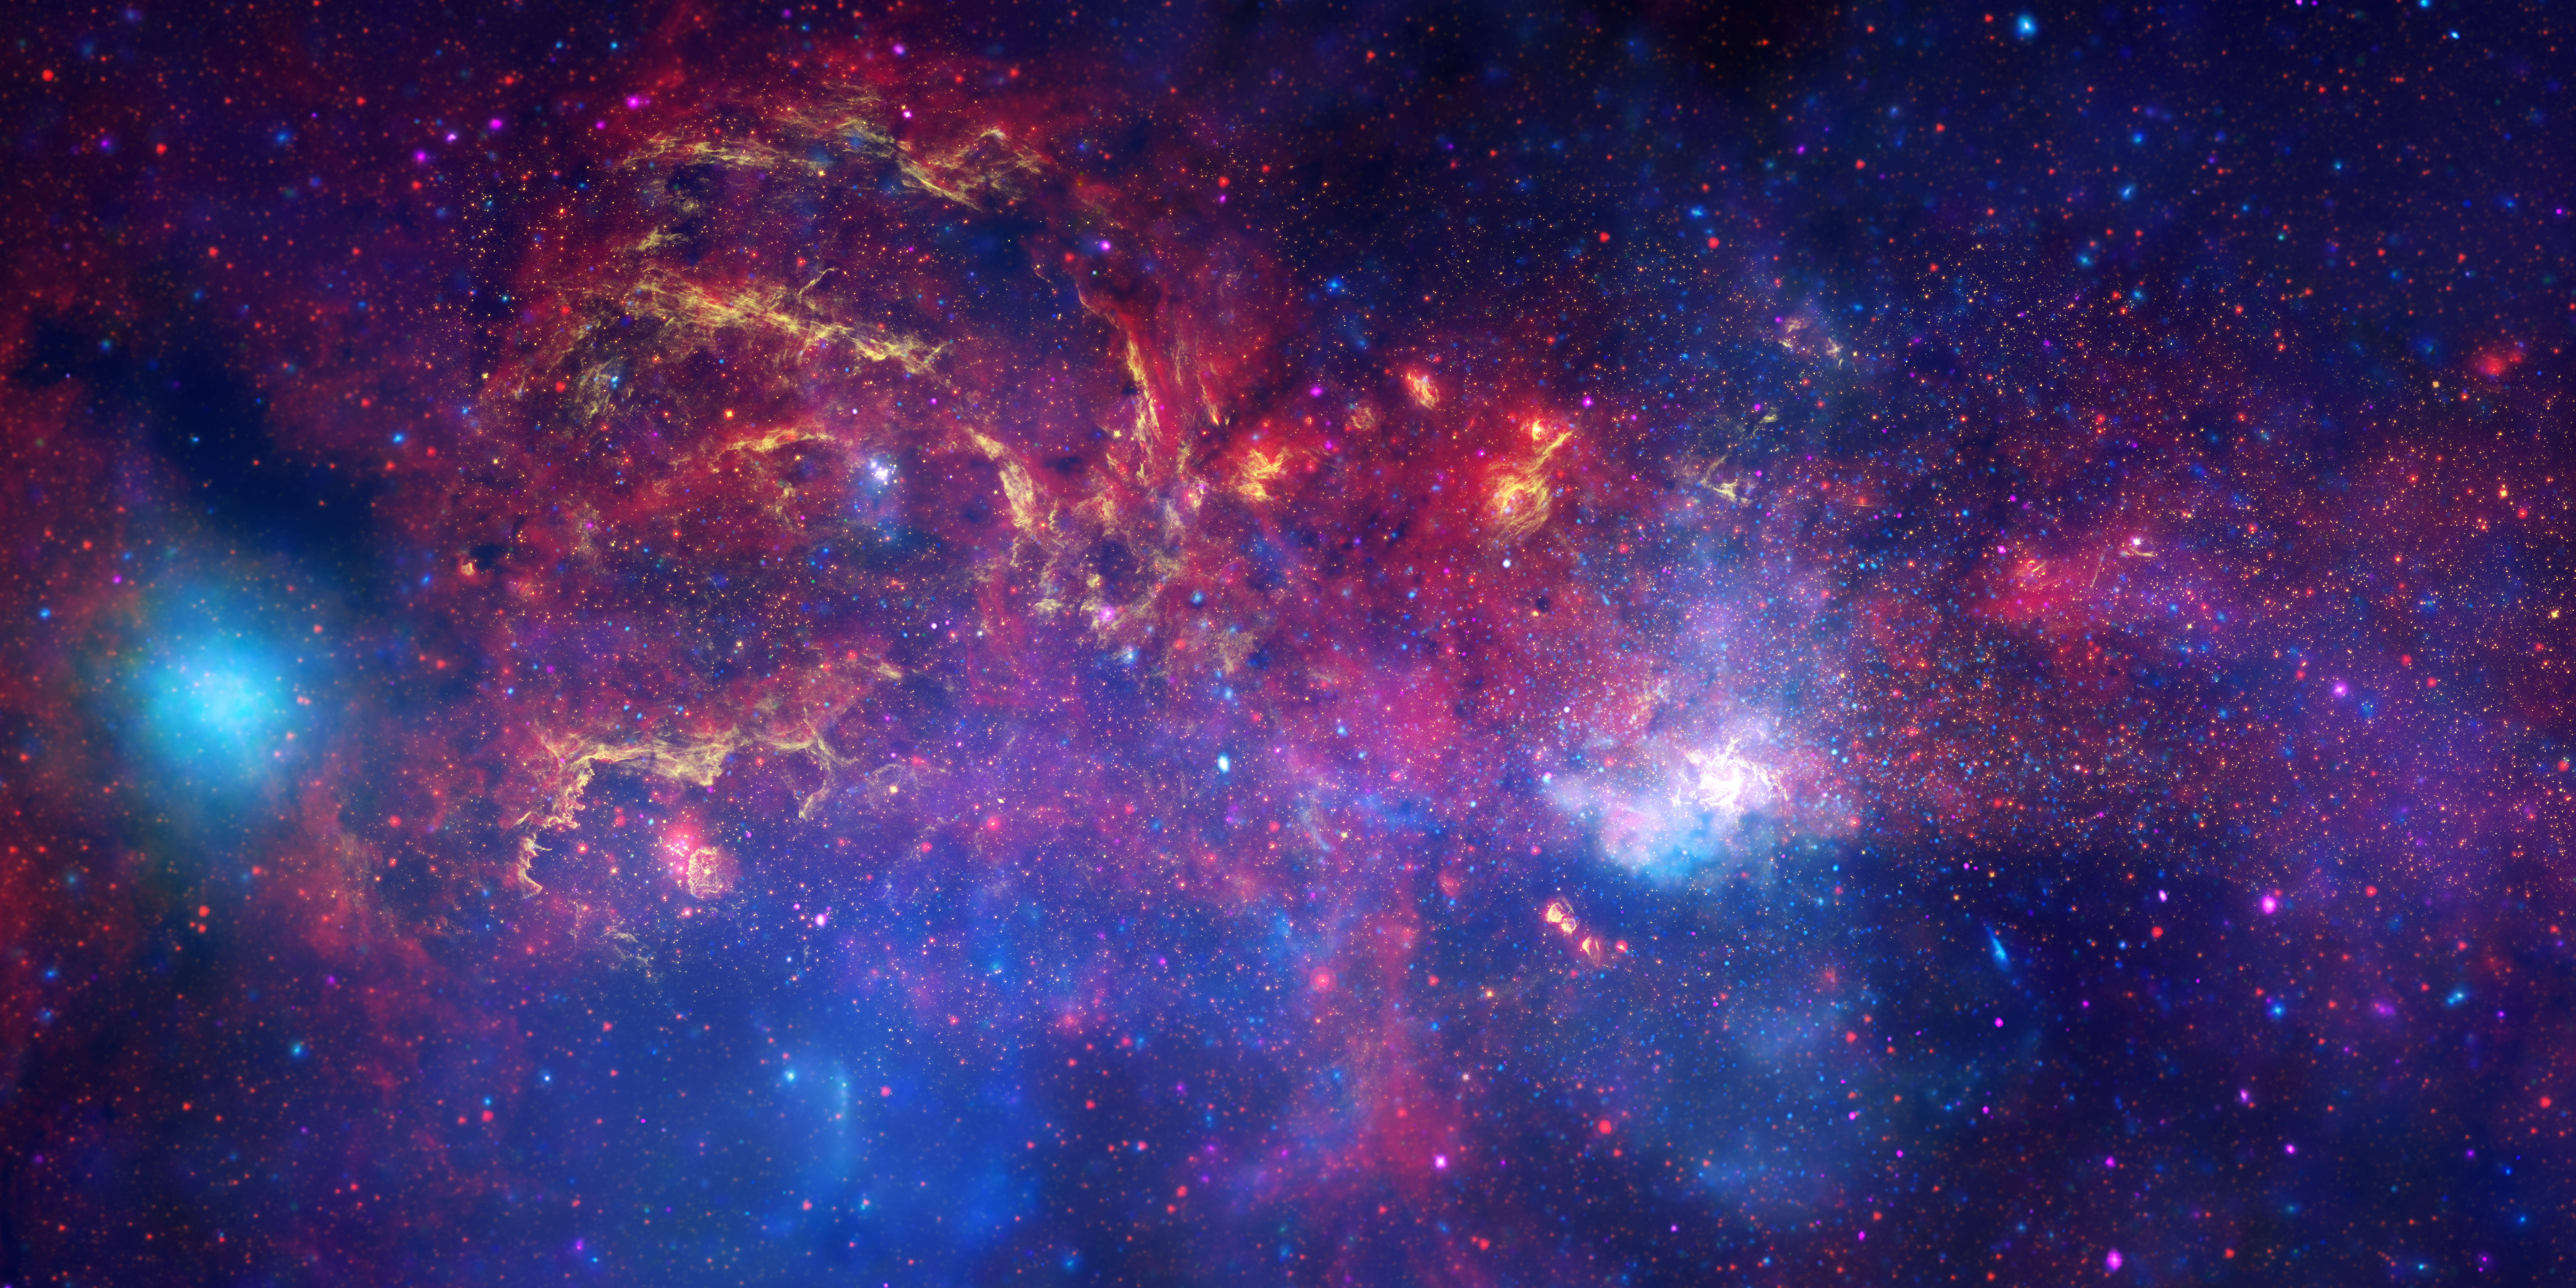

Hubble and other Great Observatories examine the galactic centre region

In celebration of the International Year of Astronomy 2009, the NASA/ESA Hubble Space Telescope and its companion Great Observatories: the Spitzer Space Telescope and the Chandra X-ray Observatory have collaborated to produce an unprecedented image of the central region of our Milky Way galaxy.

In this spectacular image, observations using infrared light and X-ray light see through the obscuring dust and reveal the intense activity near the galactic core. Note that the centre of the galaxy is located within the bright white region to the right of and just below the middle of the image. The entire image width covers about one-half a degree, about the same angular width as the full moon.

Each telescope's contribution is presented in a different colour:

Yellow represents the near-infrared observations of Hubble. They outline the energetic regions where stars are being born as well as reveal hundreds of thousands of stars.
Red represents the infrared observations of Spitzer. The radiation and winds from stars create glowing dust clouds that exhibit complex structures from compact, spherical globules to long, stringy filaments.
Blue and violet represent the X-ray observations of Chandra. X-rays are emitted by gas heated to millions of degrees by stellar explosions and by outflows from the supermassive black hole in the galaxy's centre. The bright blue blob on the left side is emission from a double star system containing either a neutron star or a black hole.

When these views are brought together, this composite image provides one of the most detailed views ever of our galaxy's mysterious core.

Credit: NASA, ESA, SSC, CXC and STScI